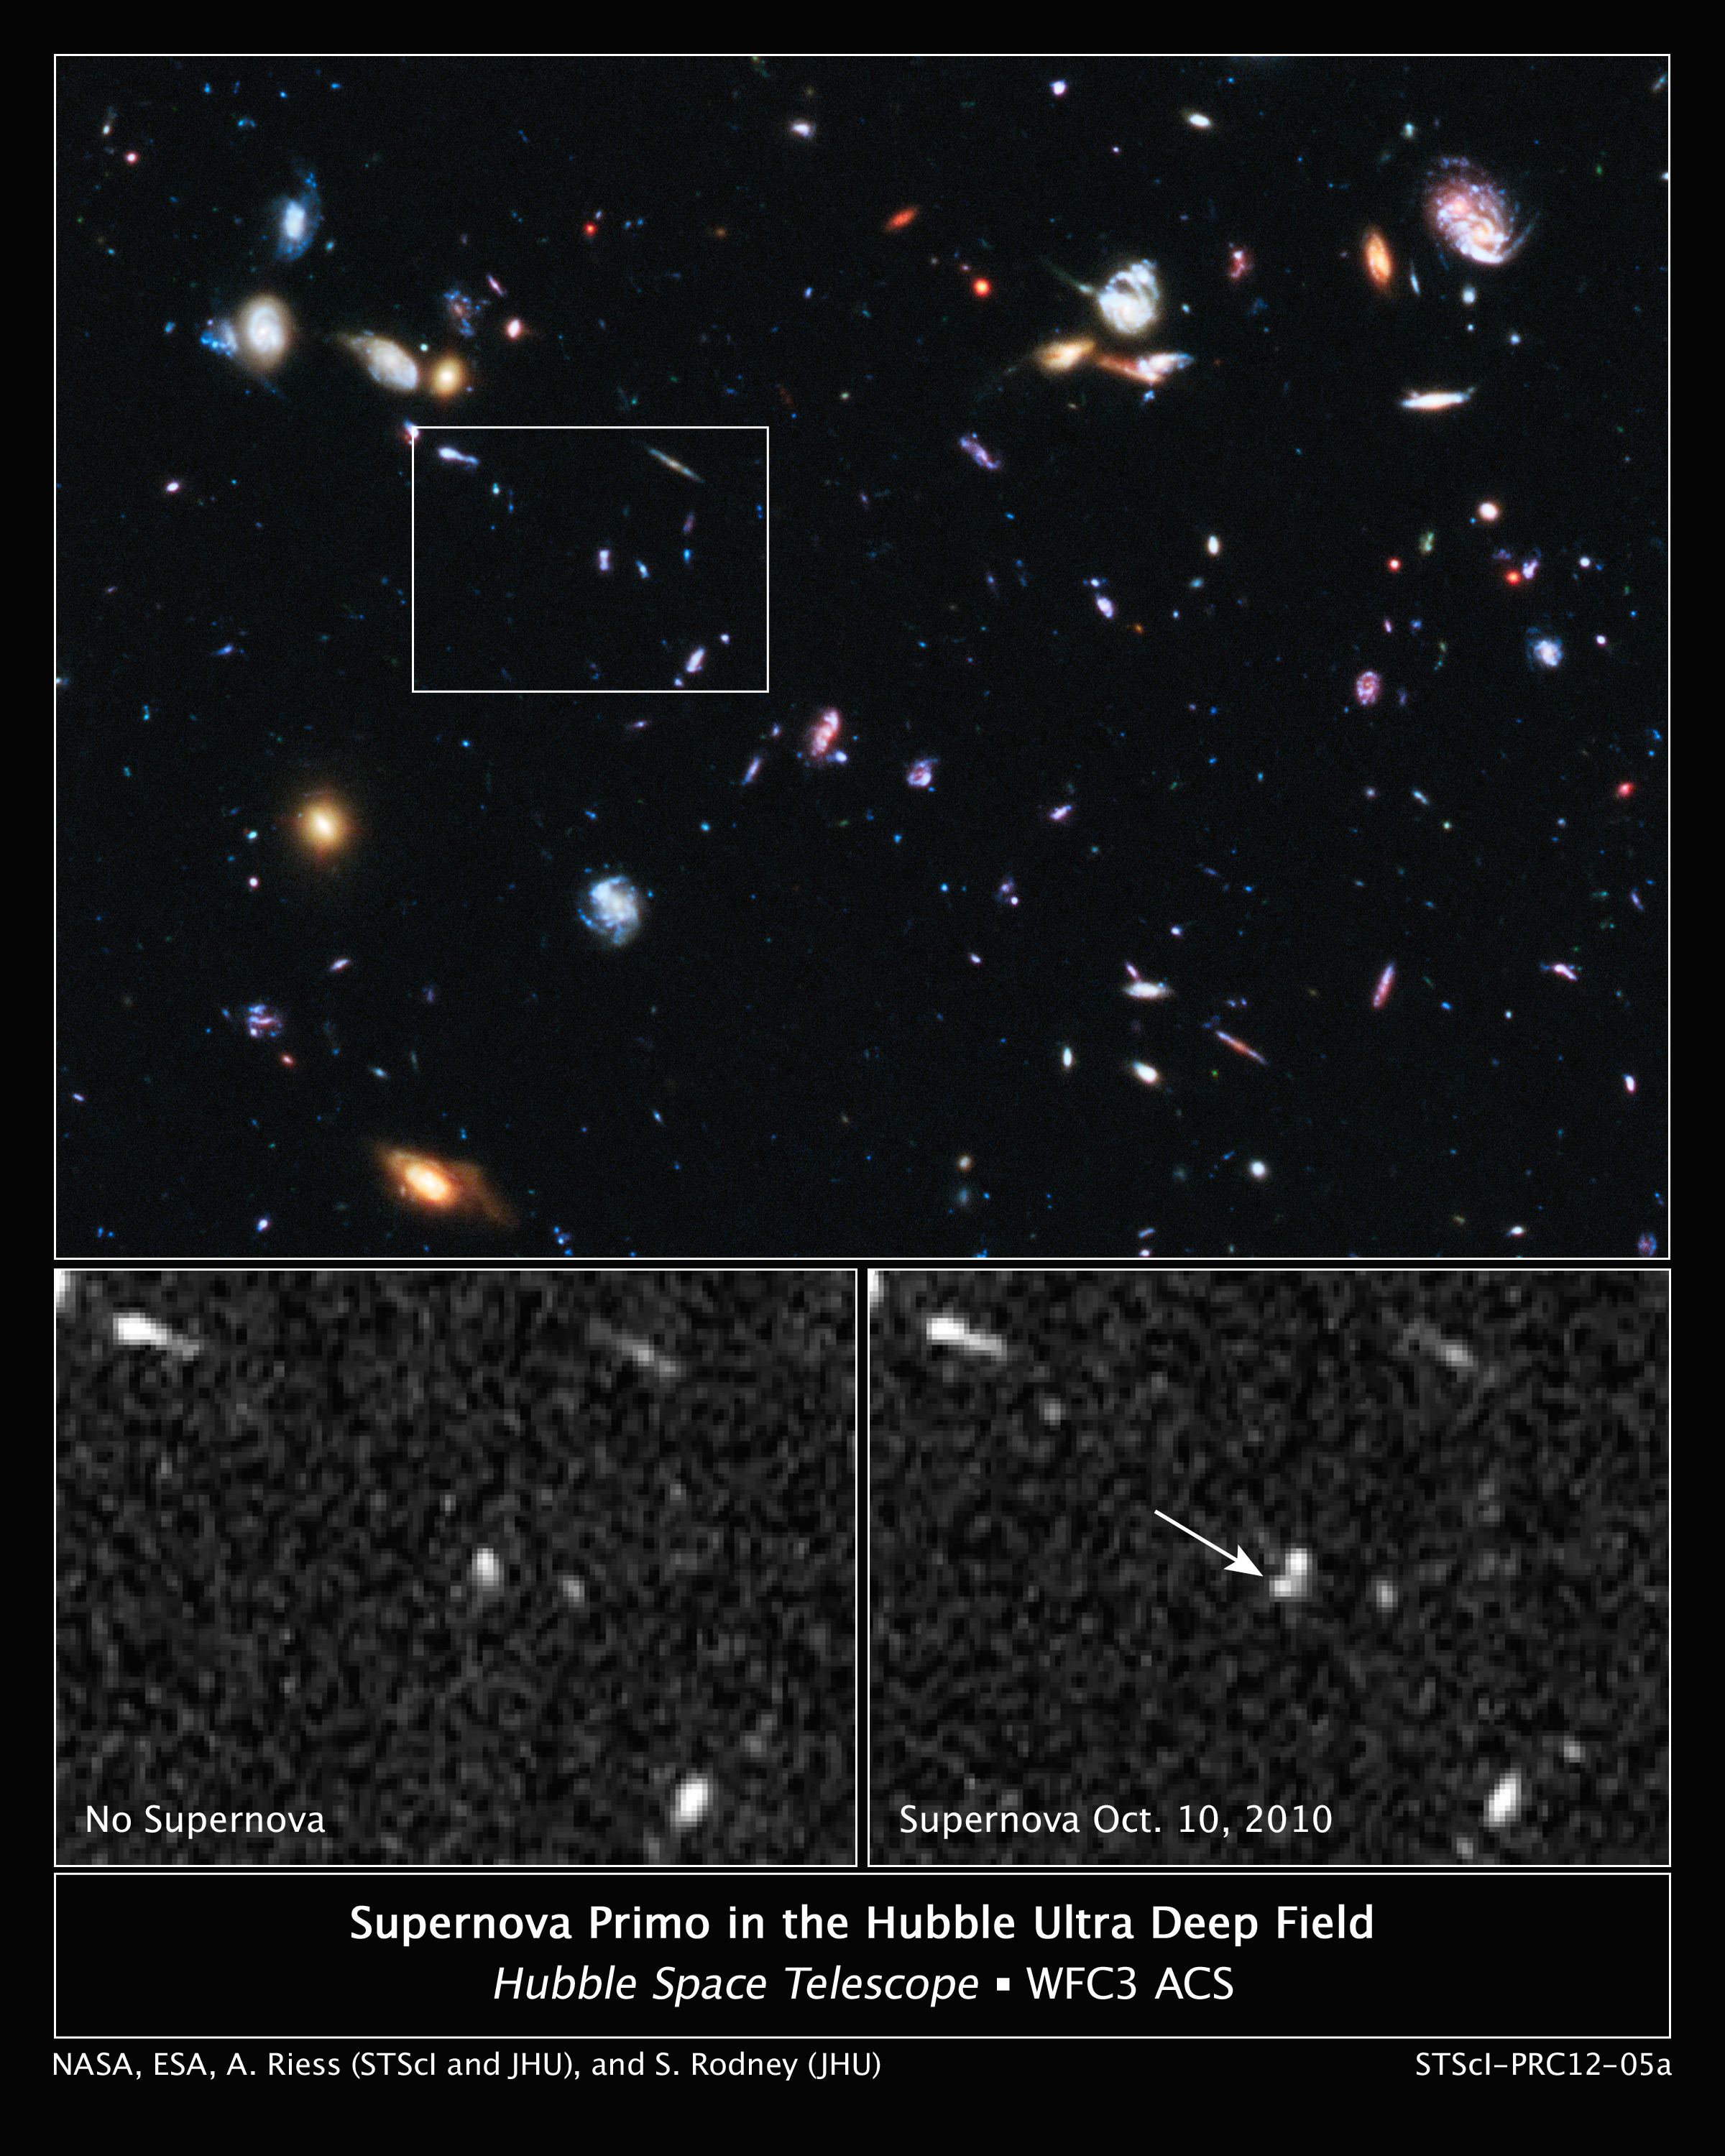

Hubble snags one of the farthest exploding stars

These three images taken by the NASA/ESA Hubble Space Telescope reveal the emergence of an exploding star, called a supernova.

Nicknamed SN Primo, the exploding star belongs to a special class called Type Ia supernovae, which are distance markers used for studying dark energy and the expansion rate of the universe. Type Ia supernovae most likely arise when white dwarf stars — the burned-out cores of normal stars — siphon too much material from their companion stars and explode.

The top image shows part of the Hubble Ultra Deep Field, the region where astronomers were looking for a supernova blast. The white box pinpoints the area where the supernova is later seen. The image combines observations taken in visible and near-infrared light with the Advanced Camera for Surveys and the Wide Field Camera 3.

The image at bottom left, taken by the Wide Field Camera 3, is a close-up of the field without the supernova.

A new bright object, identified as the supernova, appears in the Wide Field Camera 3 image at bottom right.

The exploding star was discovered as part of a search for distant Type Ia supernovae called the CANDELS+CLASH Supernova Project.

The supernova team's search technique involved taking multiple near-infrared images over several months, looking for a supernova's faint glow. Once the team spotted the stellar blast in October 2010, they used WFC3's spectrometer to verify SN Primo's distance and to decode its light, finding the unique signature of a Type Ia supernova. The team then re- imaged SN Primo periodically for several months, measuring the slow dimming of its light.

Credit: NASA, ESA, A. Riess (Space Telescope Science Institute and The Johns Hopkins University), and S. Rodney (The Johns Hopkins University)